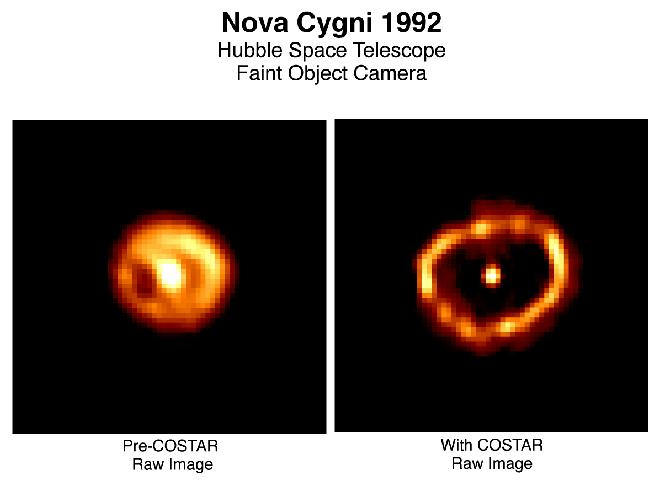

Nova Cygni 1992

The European Space Agency's ESA Faint Object Camera utilizing the corrective optics provided by NASA's COSTAR (Corrective Optics Space Telescope Axial Replacement), has given astronomers their best look yet at a rapidly ballooning bubble of gas blasted off a star.

The shell surrounds Nova Cygni 1992, which erupted on February 19, 1992. A nova is a thermonuclear explosion that occurs on the surface of a white dwarf star in a double star system.

Credit: F. Paresce, R. Jedrzejewski (STScI), NASA and ESA